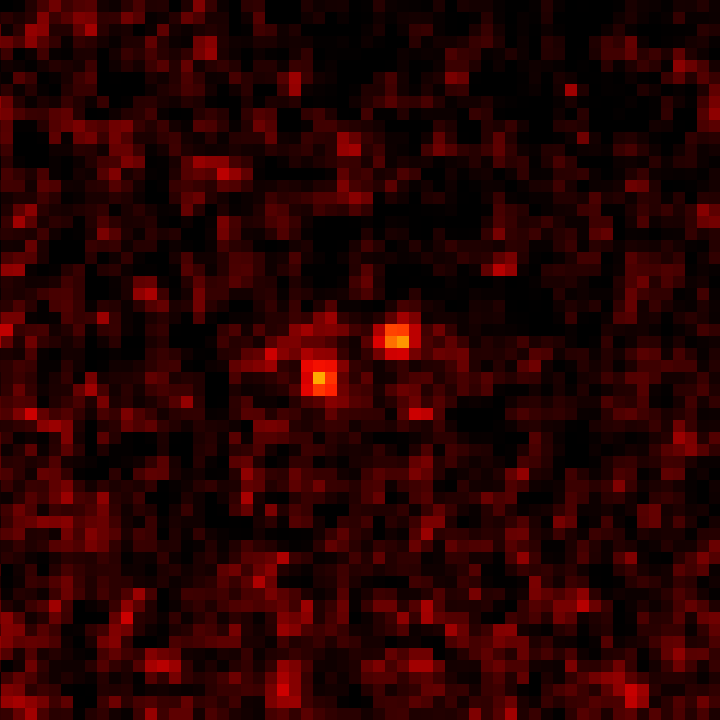

HST ACS/HRC wide view of Fomalhaut b planet in 2004 and 2006

The two objects visible in the image are the planet Fomalhaut b, captured 21 months apart, using Hubble's Advanced Camera for Surveys. Being able to see that the planet has moved is a strong sign that it is in fact in orbit around the star Fomalhaut. Astronomers calculate that it takes Fomalhaut b 872 years to orbit its parent star, and that it is at most three times the mass of Jupiter

Credit: NASA, ESA and P. Kalas (University of California, Berkeley, USA)